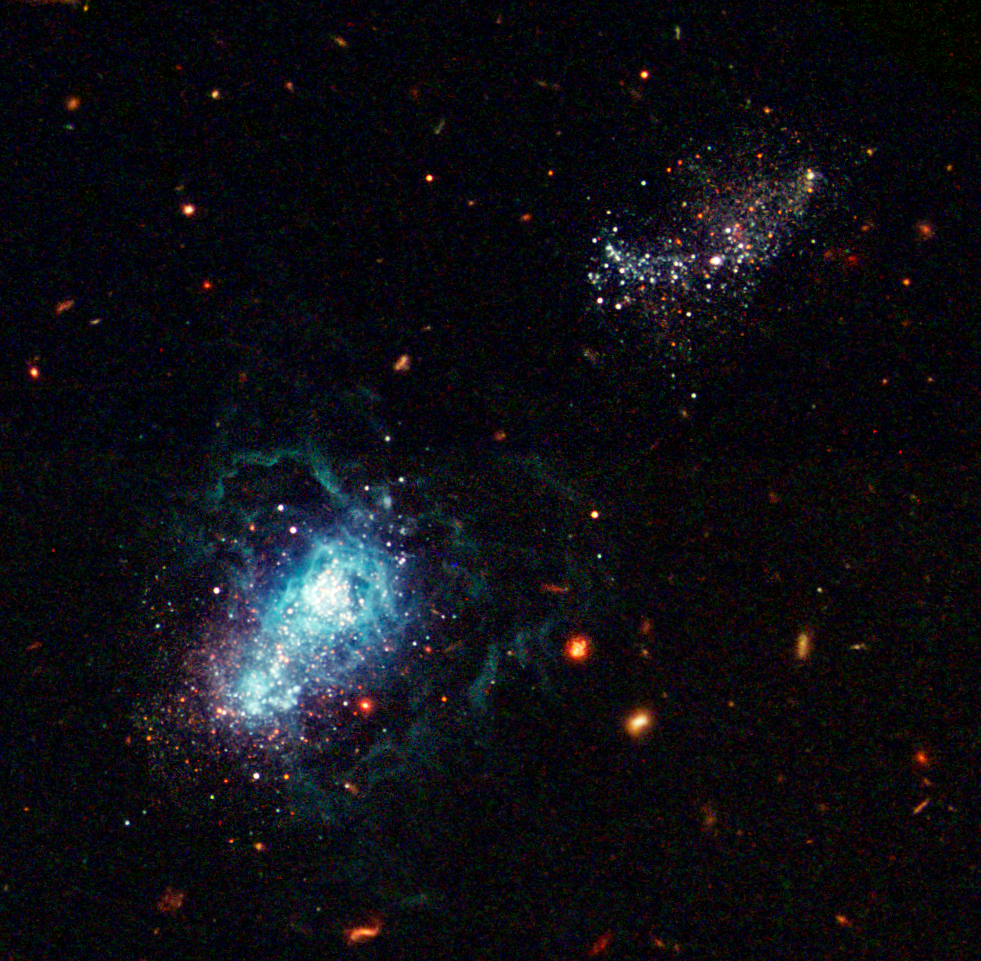

I Zwicky 18: A Baby Galaxy in a Grown-Up Universe

NASA/ESA Hubble Space Telescope snapped a view of what may be the youngest galaxy ever seen. This "late bloomer" may not have begun active star formation until about 13 billion years after the Big Bang. Called I Zwicky 18 [below, left], the galaxy may be as young as 500 million years old. This youngster has gone though several sudden bursts of star formation - the first only some 500 million years ago and the latest only 4 million years ago. This galaxy is typical of the kinds of galaxies that inhabited the early universe. The galaxy is classified as a dwarf irregular galaxy and is much smaller than our Milky Way.

Credit: NASA, ESA, Y. Izotov (Main Astronomical Observatory, Kyiv, UA) and T. Thuan (University of Virginia)